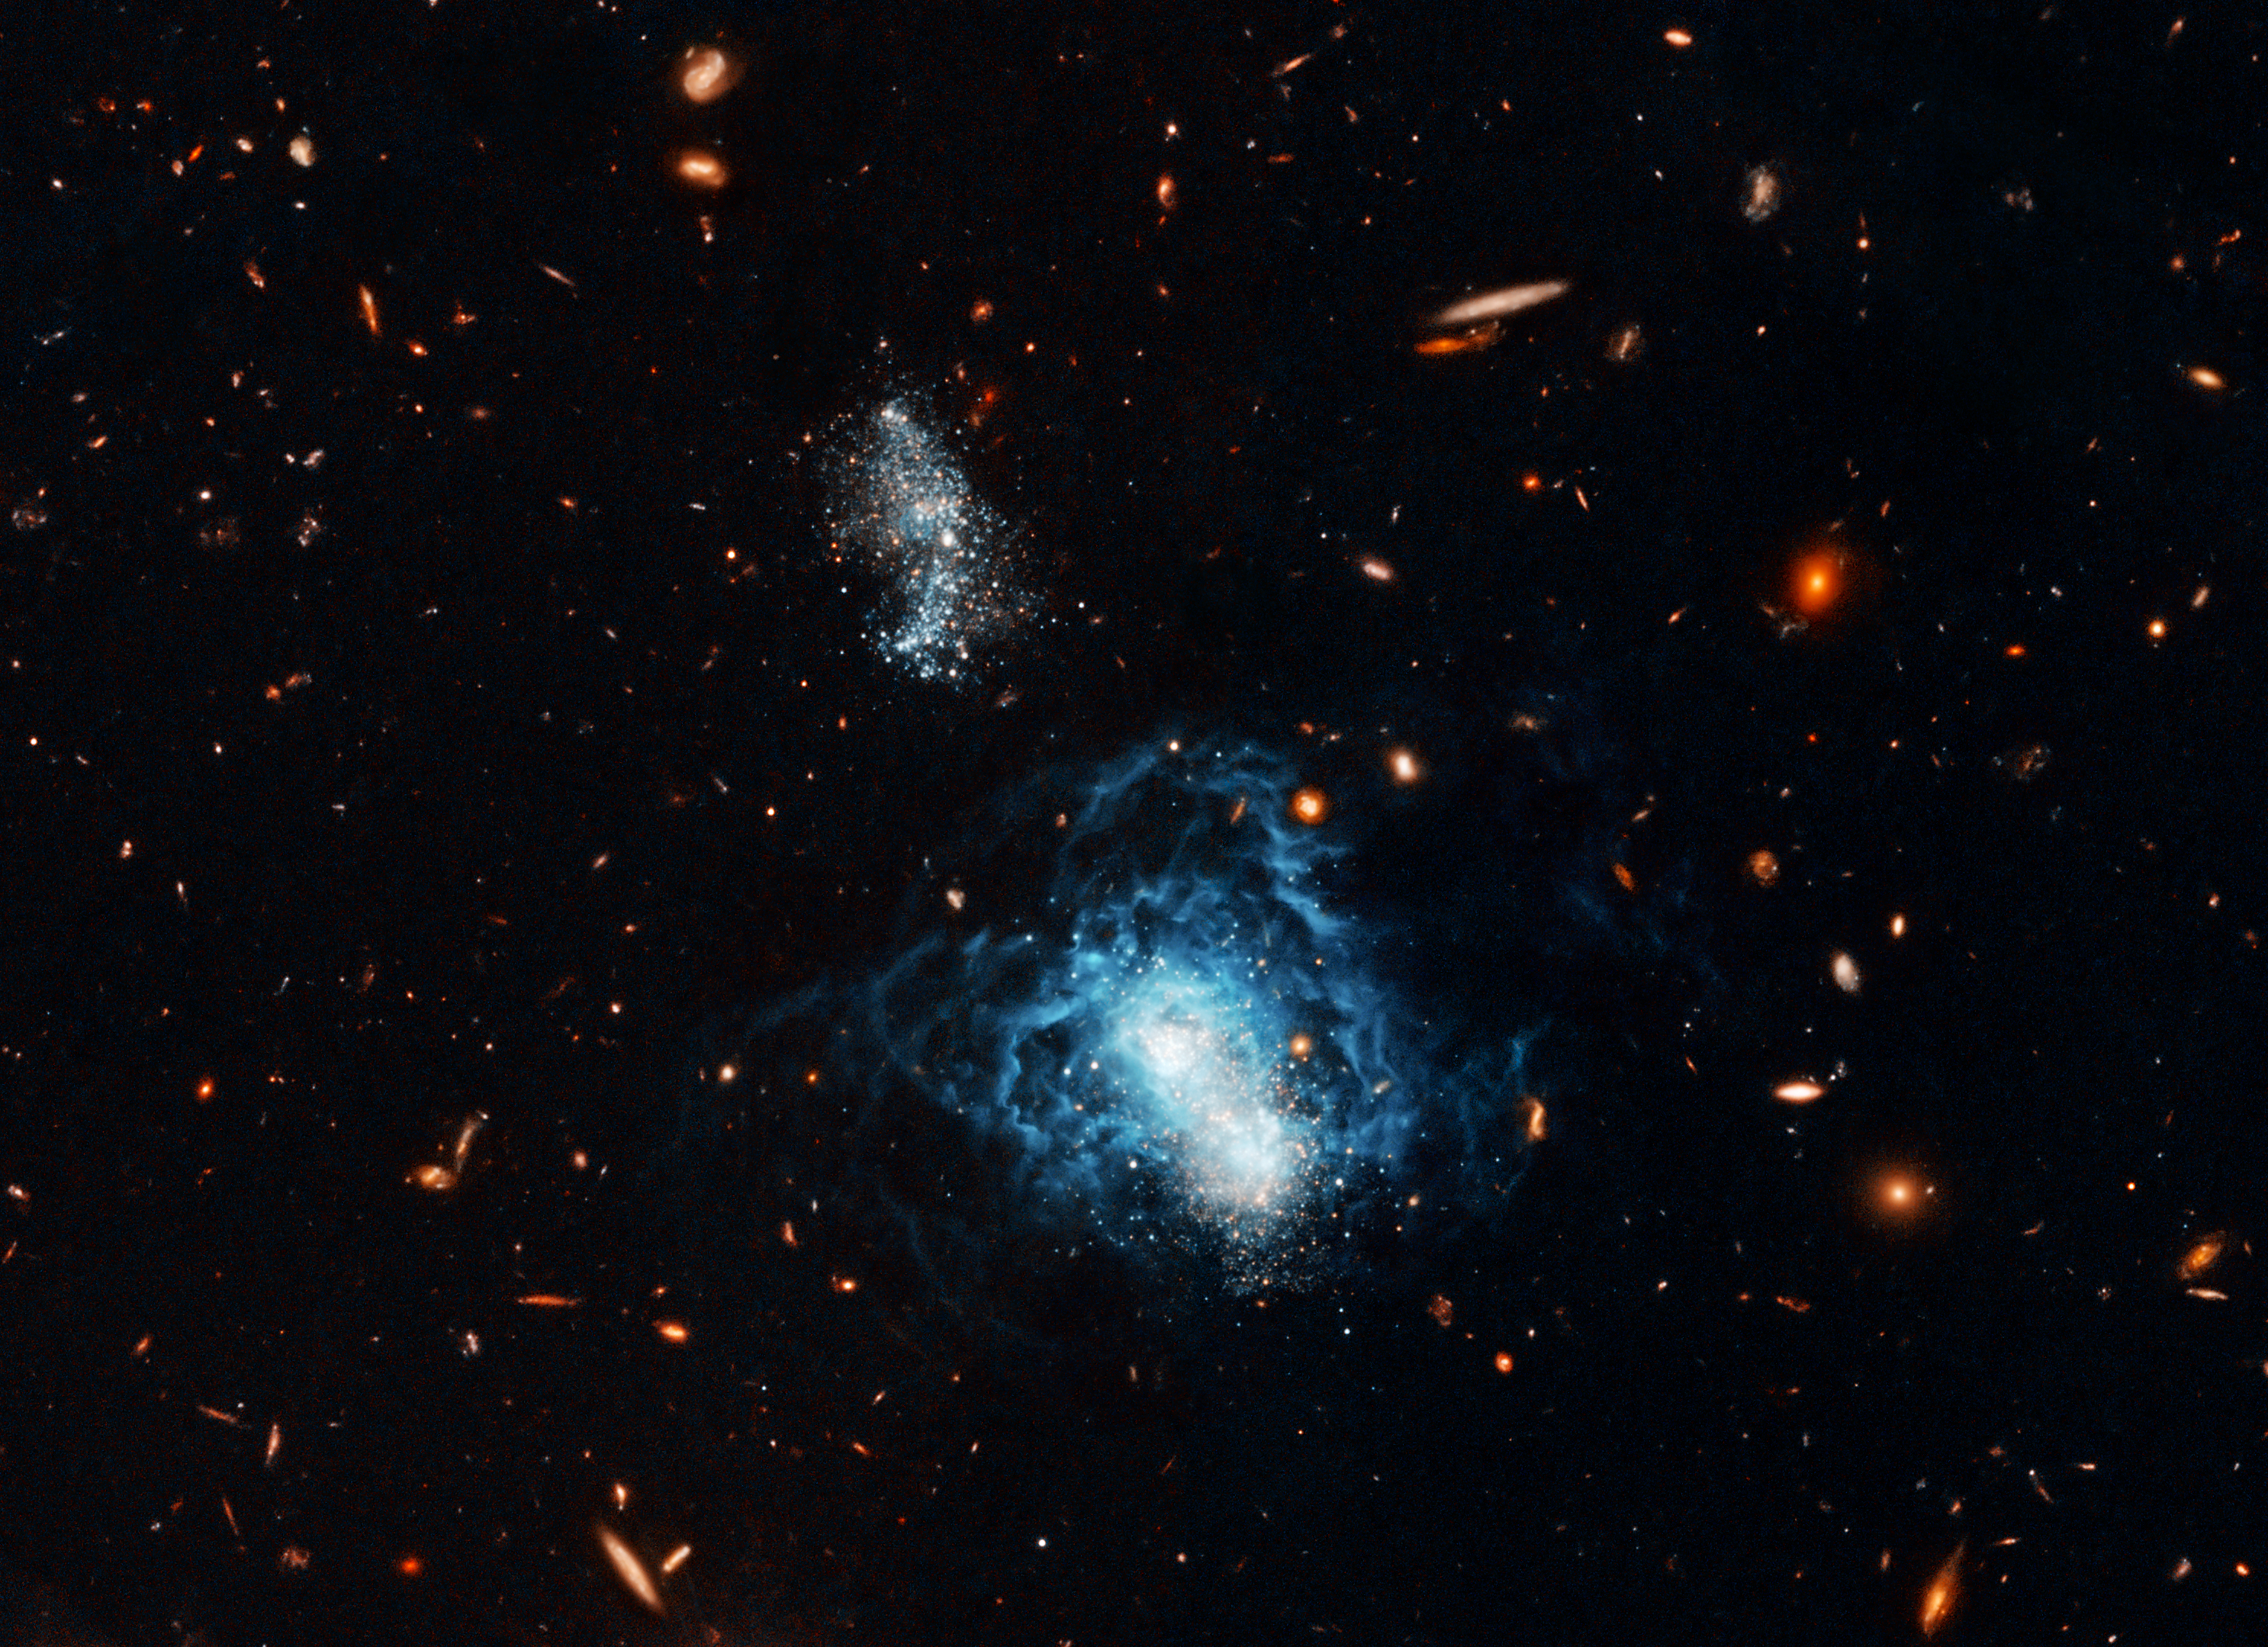

Hubble Finds Mature Galaxy Masquerading as Toddler

The NASA/ESA Hubble Space Telescope quashed the possibility that what was previously believed to be a toddler galaxy in the nearby universe may actually be considered an adult. Called I Zwicky 18, this galaxy has a youthful appearance that resembles galaxies typically found only in the early universe. Hubble has now found faint, older stars within this galaxy, suggesting that the galaxy may have formed at the same time as most other galaxies.

I Zwicky 18 is classified as a dwarf irregular galaxy and is much smaller than our Milky Way Galaxy. The concentrated bluish-white knots embedded in the heart of the galaxy are two major starburst regions where stars are forming at a furious rate. The wispy blue filaments surrounding the central starburst regions are bubbles of gas that have been blown away by stellar winds and supernovae explosions from a previous generation of hot, young stars. This gas is now heated by intense ultraviolet radiation unleashed by hot, young stars.

A companion galaxy lies just above and to the left of I Zwicky 18. The companion may be interacting with I Zwicky 18 by gravitationally tugging on the galaxy. The interaction may have triggered the galaxy's recent star formation that is responsible for the youthful appearance. Besides the bluish-white young stars, white-reddish stars also are visible in both I Zwicky 18 and its companion. These stars may be as old as 10 billion years. The reddish extended objects surrounding I Zwicky 18 and its companion are ancient, fully formed galaxies of different shapes that are much farther away.

Hubble data also allowed astronomers for the first time to identify Cepheid variable stars in I Zwicky 18. These flashing stellar mile-markers were used to determine that I Zwicky 18 is 59 million light-years from Earth, almost 10 million light-years more distant than previously believed.

The observations of I Zwicky 18 were taken in 2005 and 2006 with Hubble's Advanced Camera for Surveys. Astronomers made this image by combining observations taken with blue and red filters.

The science team consists of Alessandra Aloisi and Marco Sirianni of the European Space Agency and Space Telescope Science Institute; Francesca Annibali,Jennifer Mack, and Roeland van der Marel of the Space Telescope Science Institute; Abhijit Saha of the National Optical Astronomy Observatories; and Gisella Clementini, Rodrigo Contreras, Giuliana Fiorentino, Marcella Marconi, Ilaria Musella, and Monica Tosi of the Italian National Astrophysics Institutes in Bologna and Naples.

Credit: NASA, ESA, and A. Aloisi (European Space Agency and Space Telescope Science Institute)